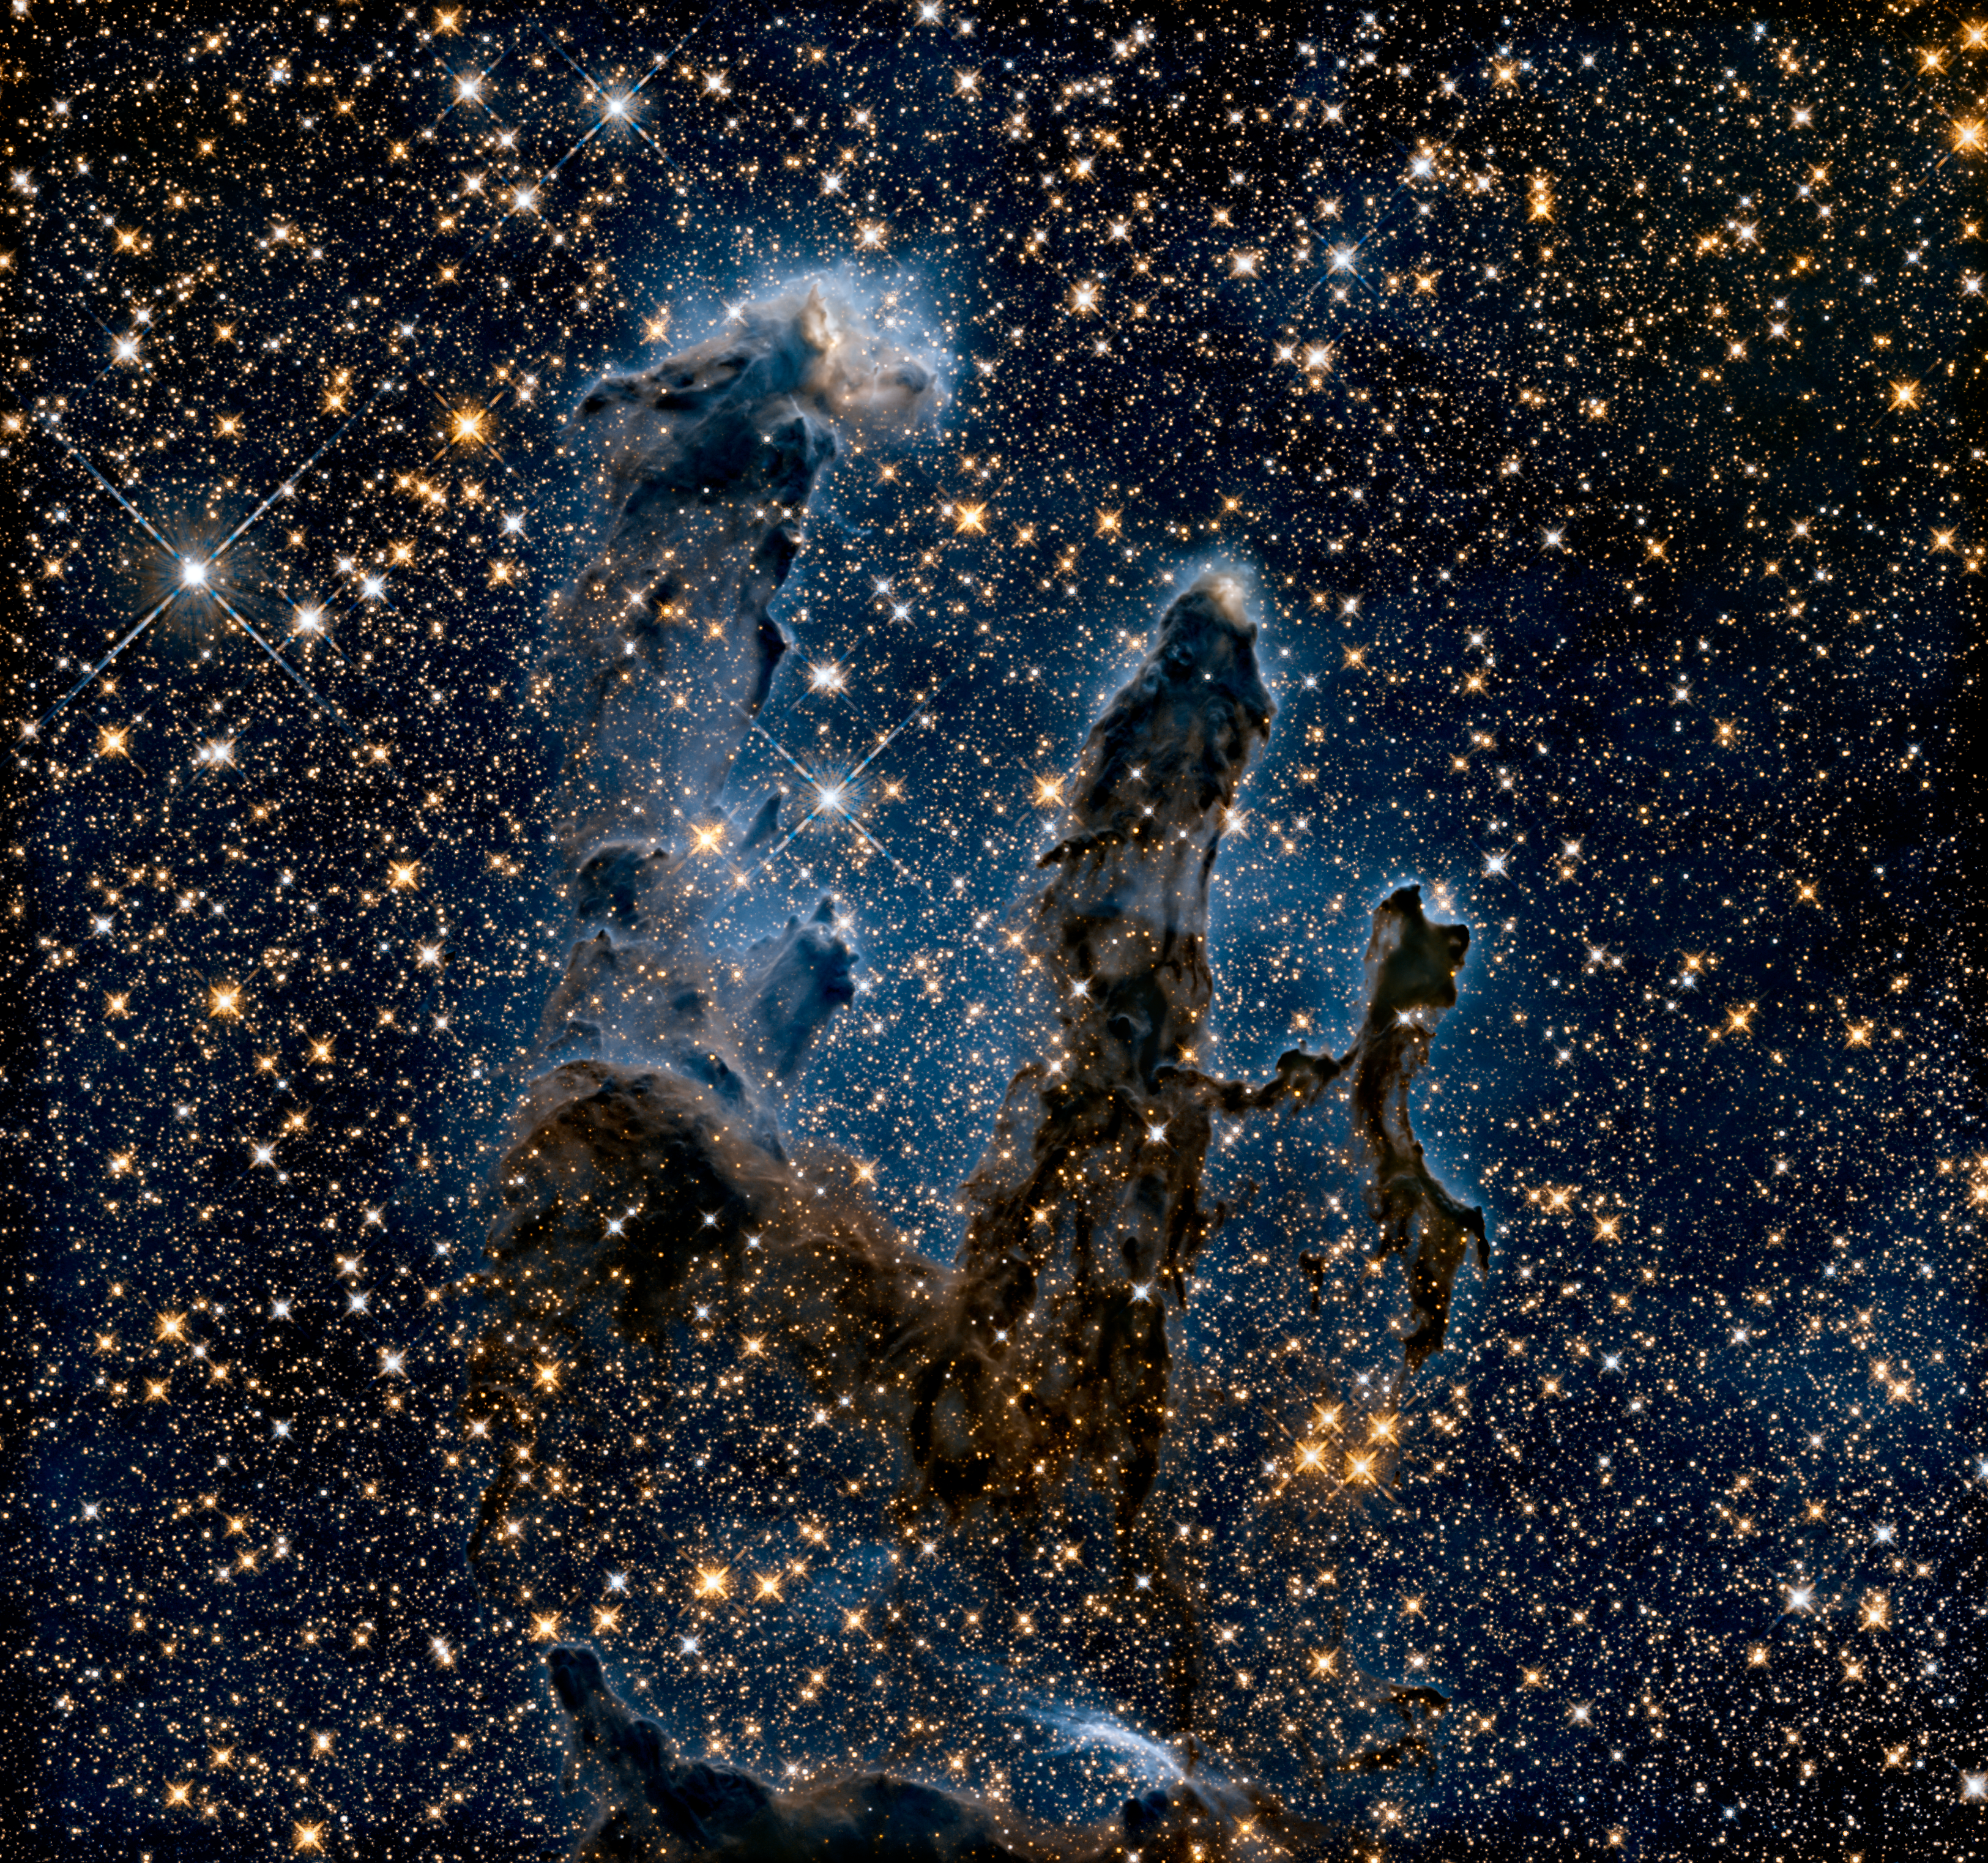

New view of the Pillars of Creation — infrared

The NASA/ESA Hubble Space Telescope has revisited one of its most iconic and popular images: the Eagle Nebula’s Pillars of Creation.

This image shows the pillars as seen in infrared light, allowing it to pierce through obscuring dust and gas and unveil a more unfamiliar — but just as amazing — view of the pillars.

In this ethereal view the entire frame is peppered with bright stars and baby stars are revealed being formed within the pillars themselves. The ghostly outlines of the pillars seem much more delicate, and are silhouetted against an eerie blue haze.

Hubble also captured the pillars in visible light.

Credit: NASA, ESA/Hubble and the Hubble Heritage Team